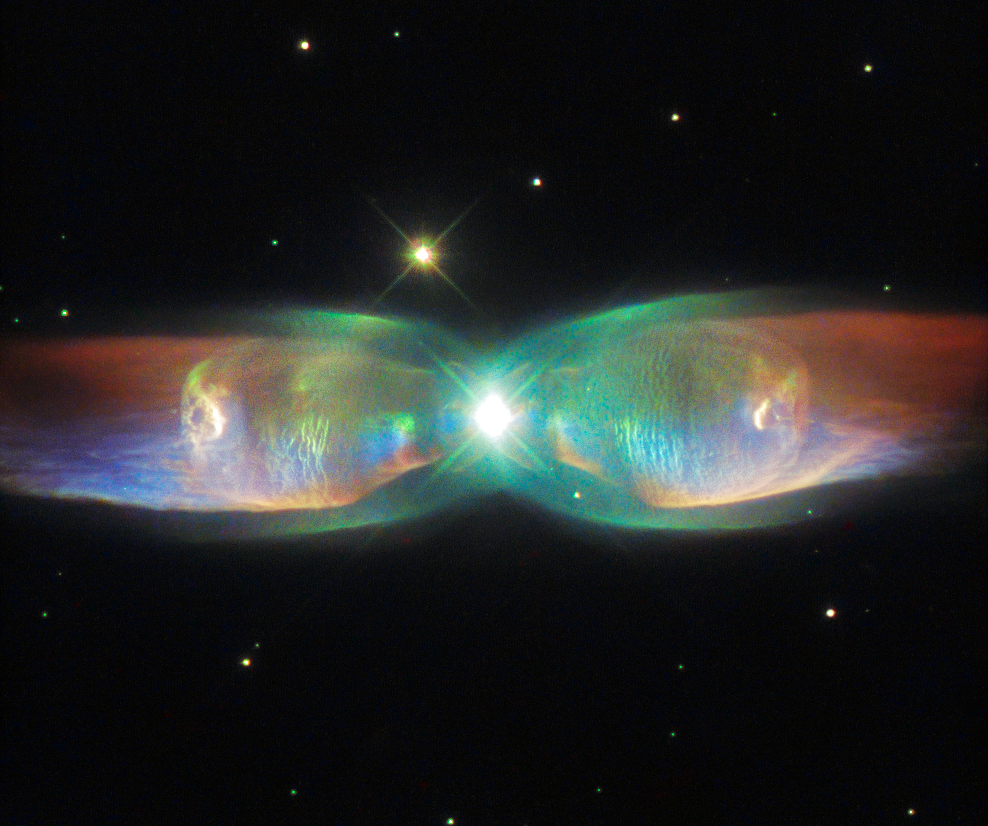

The Twin Jet Nebula

The Twin Jet Nebula, or PN M2-9, is a striking example of a bipolar planetary nebula. Bipolar planetary nebulae are formed when the central object is not a single star, but a binary system, Studies have shown that the nebula’s size increases with time, and measurements of this rate of increase suggest that the stellar outburst that formed the lobes occurred just 1200 years ago.

Credit: ESA/Hubble & NASA Acknowledgement: Judy Schmidt